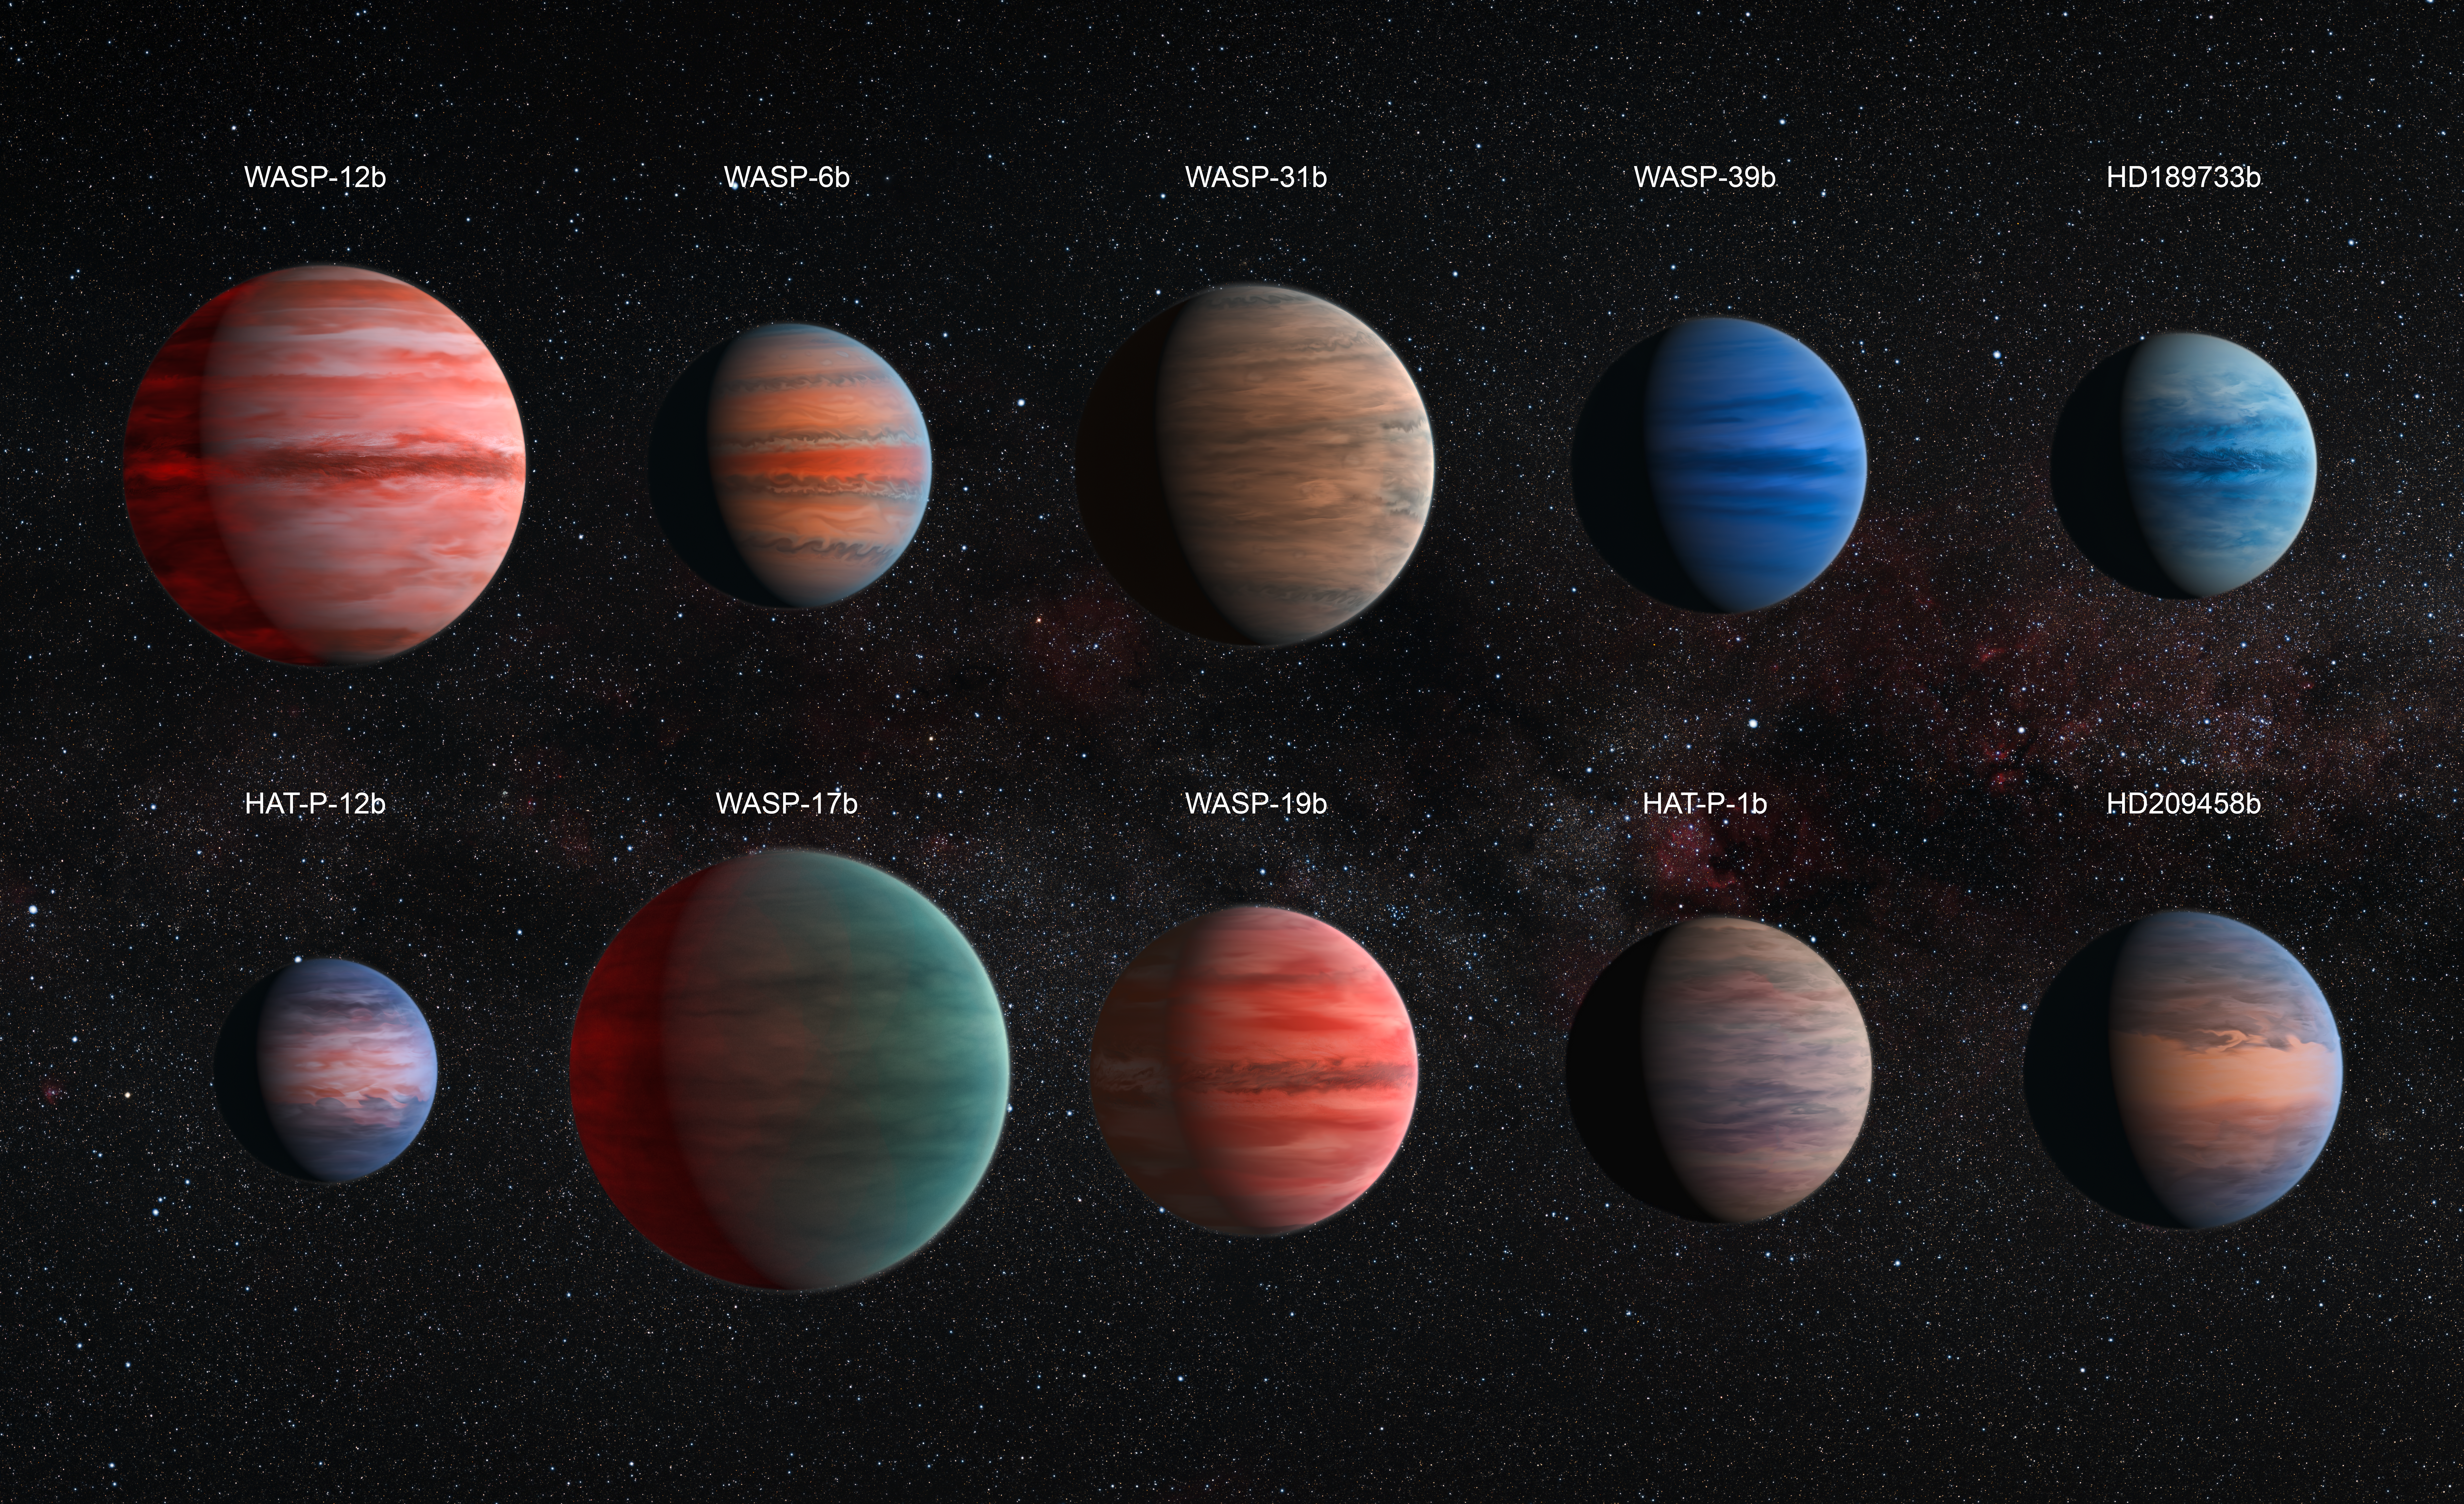

Clear to cloudy hot Jupiters (annotated)

This image shows an artist’s impression of the ten hot Jupiter exoplanets studied by David Sing and his colleagues.

The images are to scale with each other. HAT-P-12b, the smallest of them, is approximately the size of Jupiter, while WASP-17b, the largest planet in the sample, is almost twice the size. The planets are also depicted with a variety of different cloud properties.

There is almost no information about the colours of the planets available, with the exception of HD 189733b, which became known as the blue planet (heic1312).

The hottest planets within the sample are portrayed with a glowing night side. This effect is strongest on WASP-12b, the hottest exoplanet in the sample, but also visible on WASP-19b and WASP-17b. It is also known that several of the planets exhibit strong Rayleigh scattering. This effect causes the blue hue of the daytime sky and the reddening of the Sun at sunset on Earth. It is also visible as a blue edge on the planets WASP-6b, HD 189733b, HAT-P-12b, and HD 209458b.

The wind patterns shown on these ten planets, which resemble the visible structures on Jupiter, are based on theoretical models

Credit: ESA/Hubble & NASA